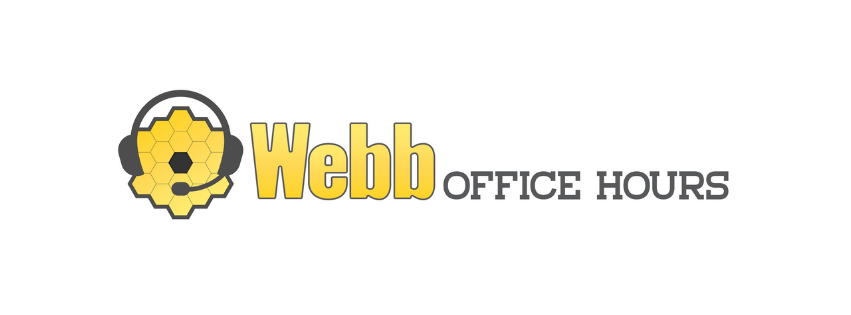

STSI’s Webb Office Hours are organised virtually by STScI and held every two weeks.

STSI’s Webb Office Hours are organised virtually by STScI and held every two weeks.

Credit: STScI